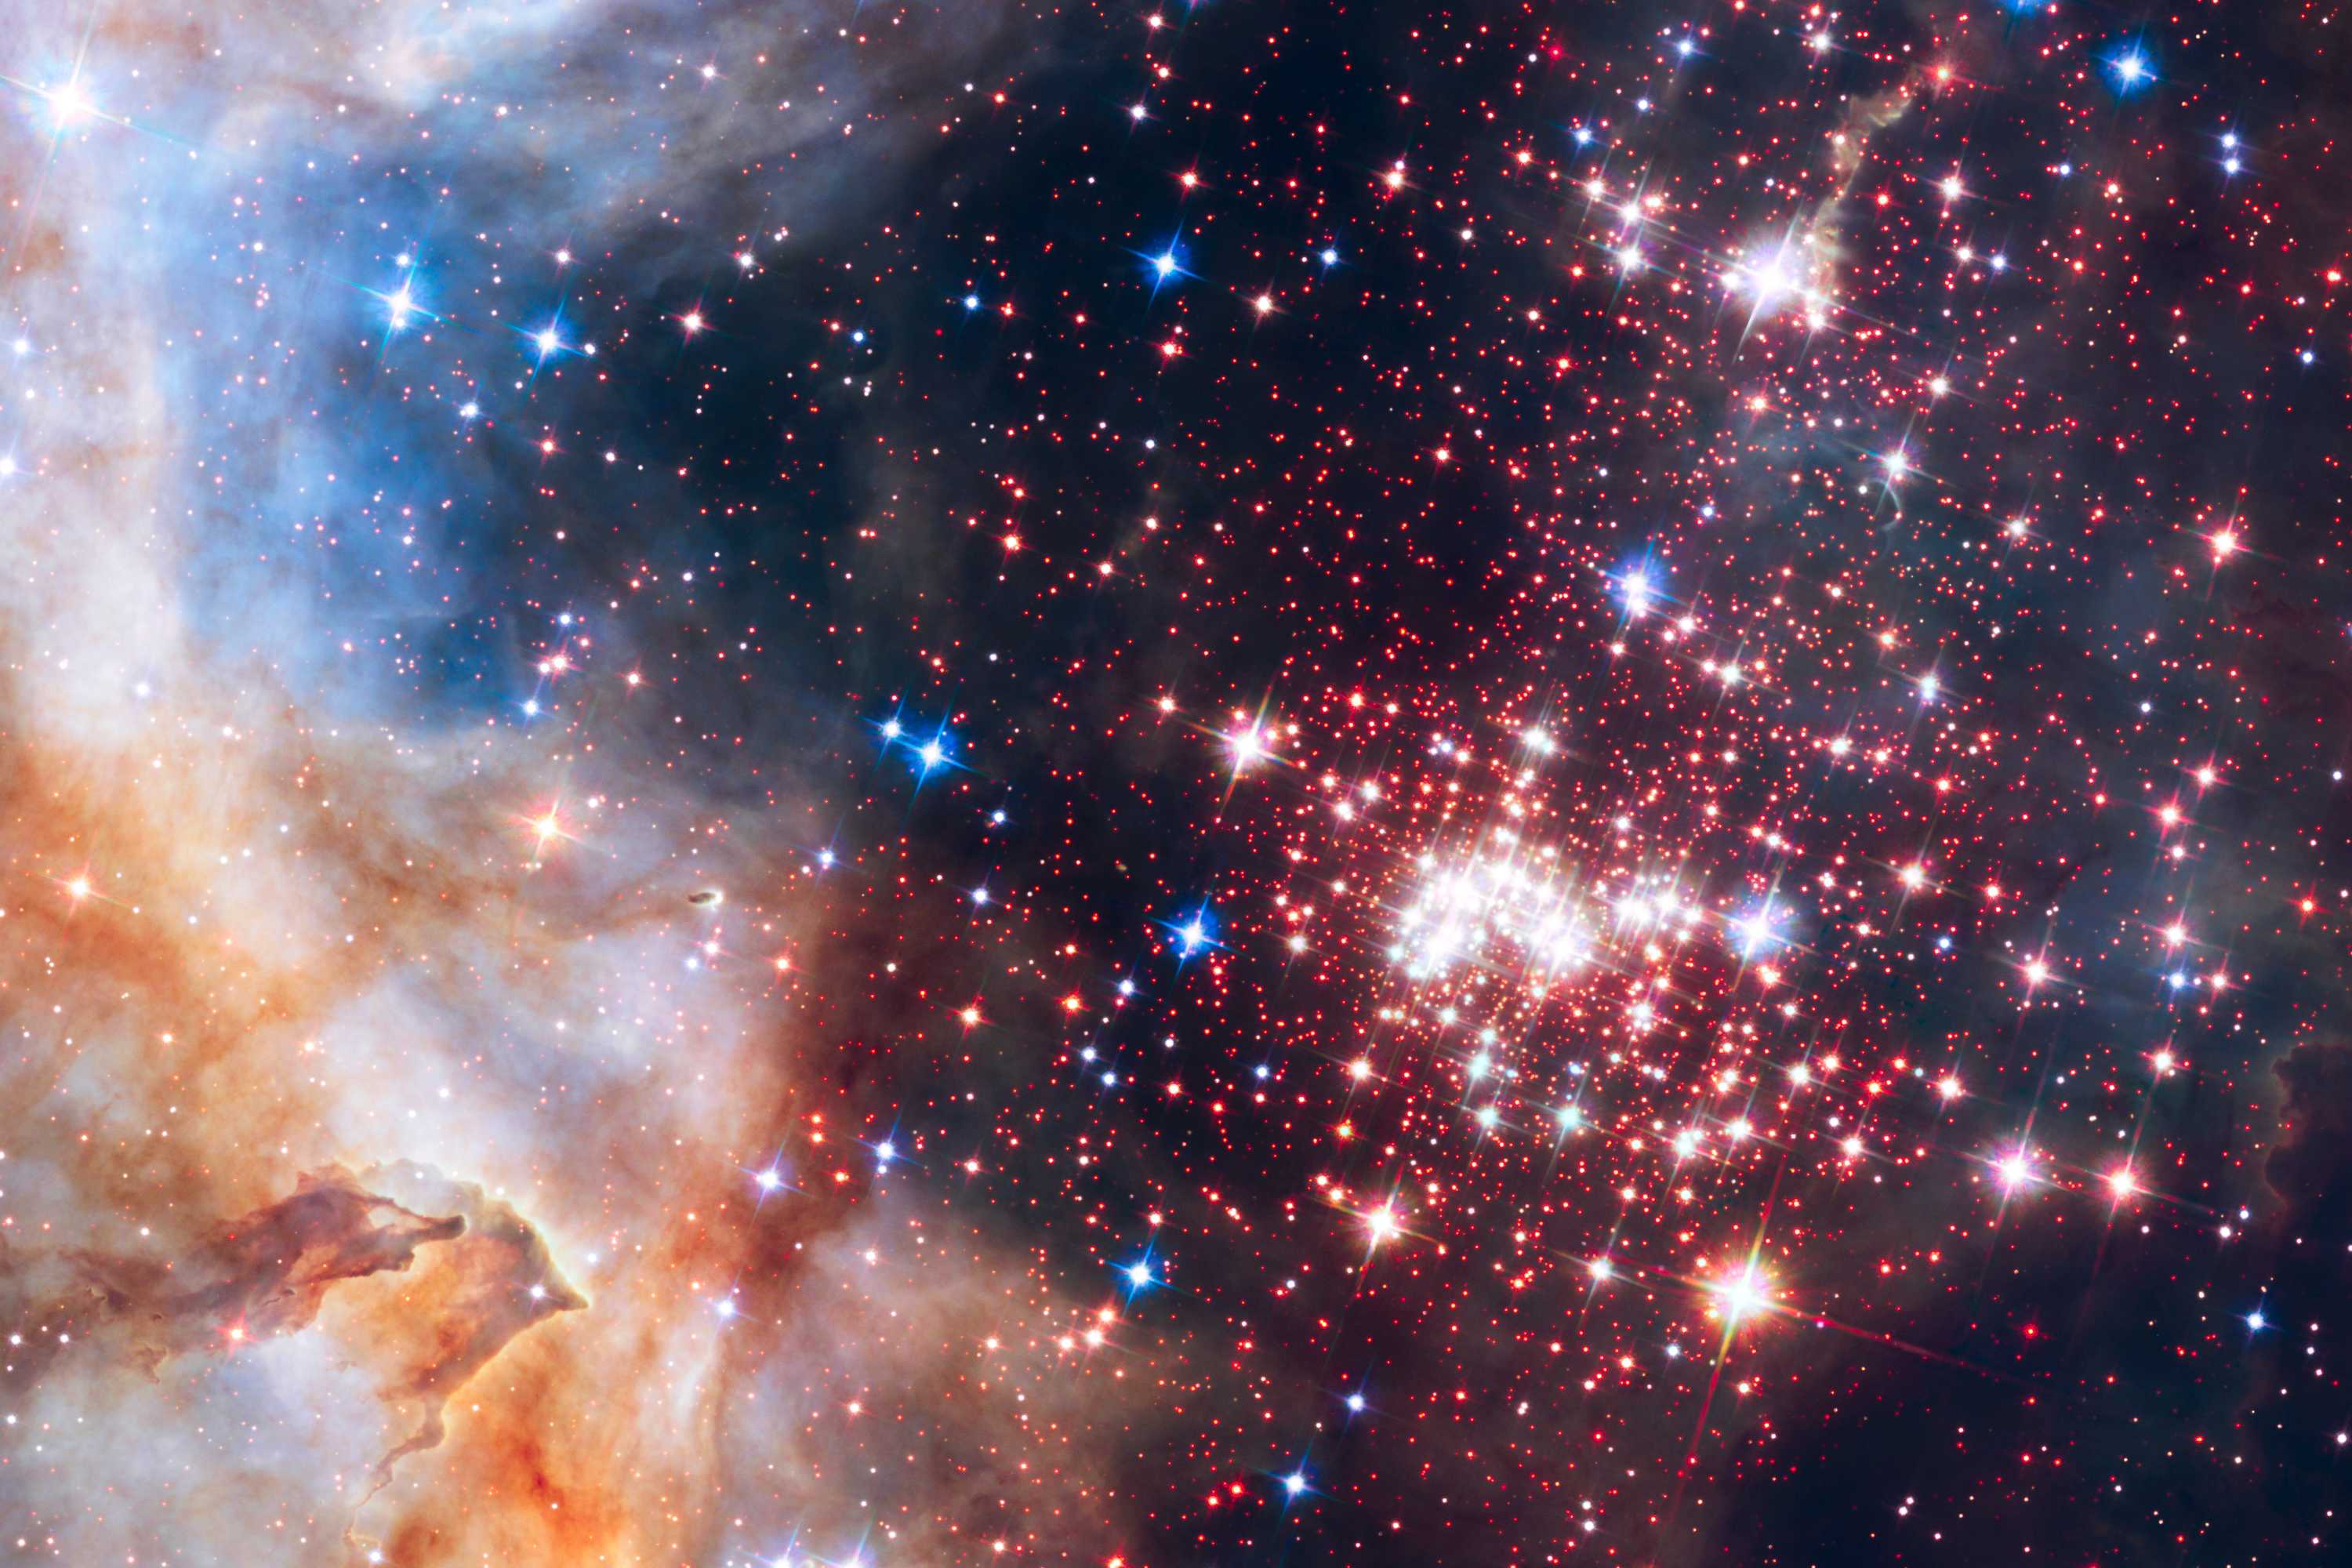

The star cluster Westerlund 2

This image shows the sparkling centerpiece of Hubble's 25th anniversary tribute. Westerlund 2 is a giant cluster of about 3000 stars located 20 000 light-years away in the constellation Carina.

Hubble's near-infrared imaging camera pierces through the dusty veil enshrouding the stellar nursery, giving astronomers a clear view of the dense concentration of stars in the central cluster.

Credit: NASA, ESA, the Hubble Heritage Team (STScI/AURA), A. Nota (ESA/STScI), and the Westerlund 2 Science Team